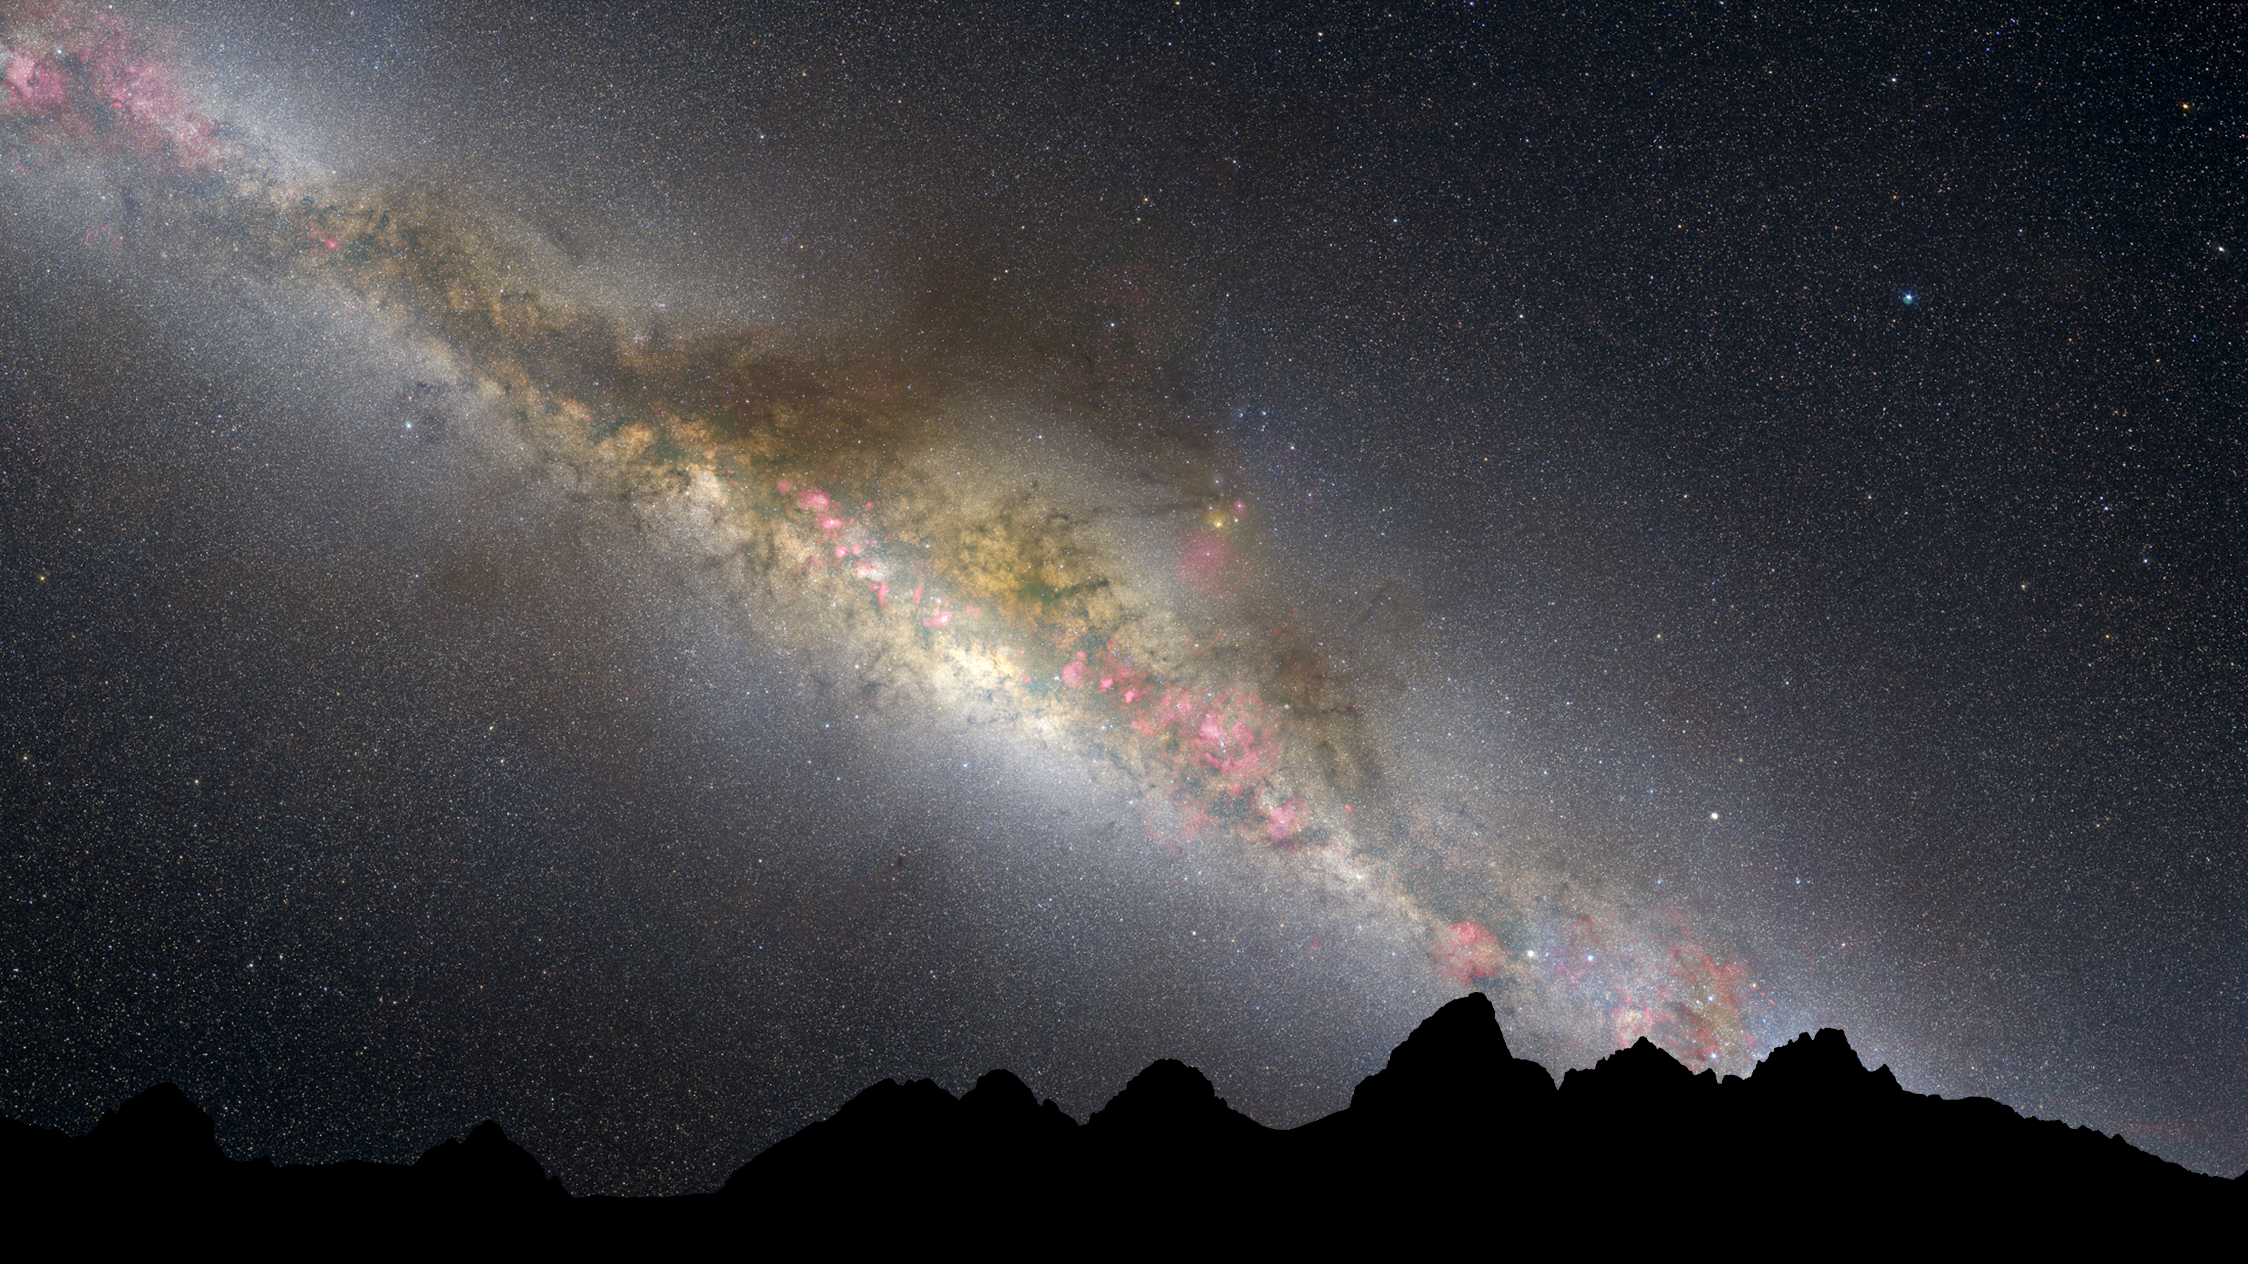

Artist's illustration of the present Milky Way

This graphic of today's Milky Way was based on an all-sky image from Axel Mellinger and the Finkbeiner all-sky H-alpha survey.

The current night sky is dominated by the white glow of myriad middle-aged stars along the lane of the Milky Way. Interstellar "pollution" from thick dust lanes can be seen threading through the long band of stars. They are interspersed with a few pinkish emission nebulae from ongoing star formation. Thousands of stars appear as pinpricks of light throughout the sky.

Credit: NASA, ESA, and Z. Levay (STScI/AURA)